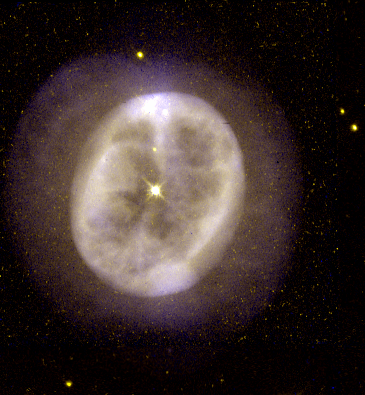

NGC 2022

This image is a part of the Hubble Gallery of Planetary Nebulae.

Credit: Howard Bond (ST ScI) and NASA/ESA